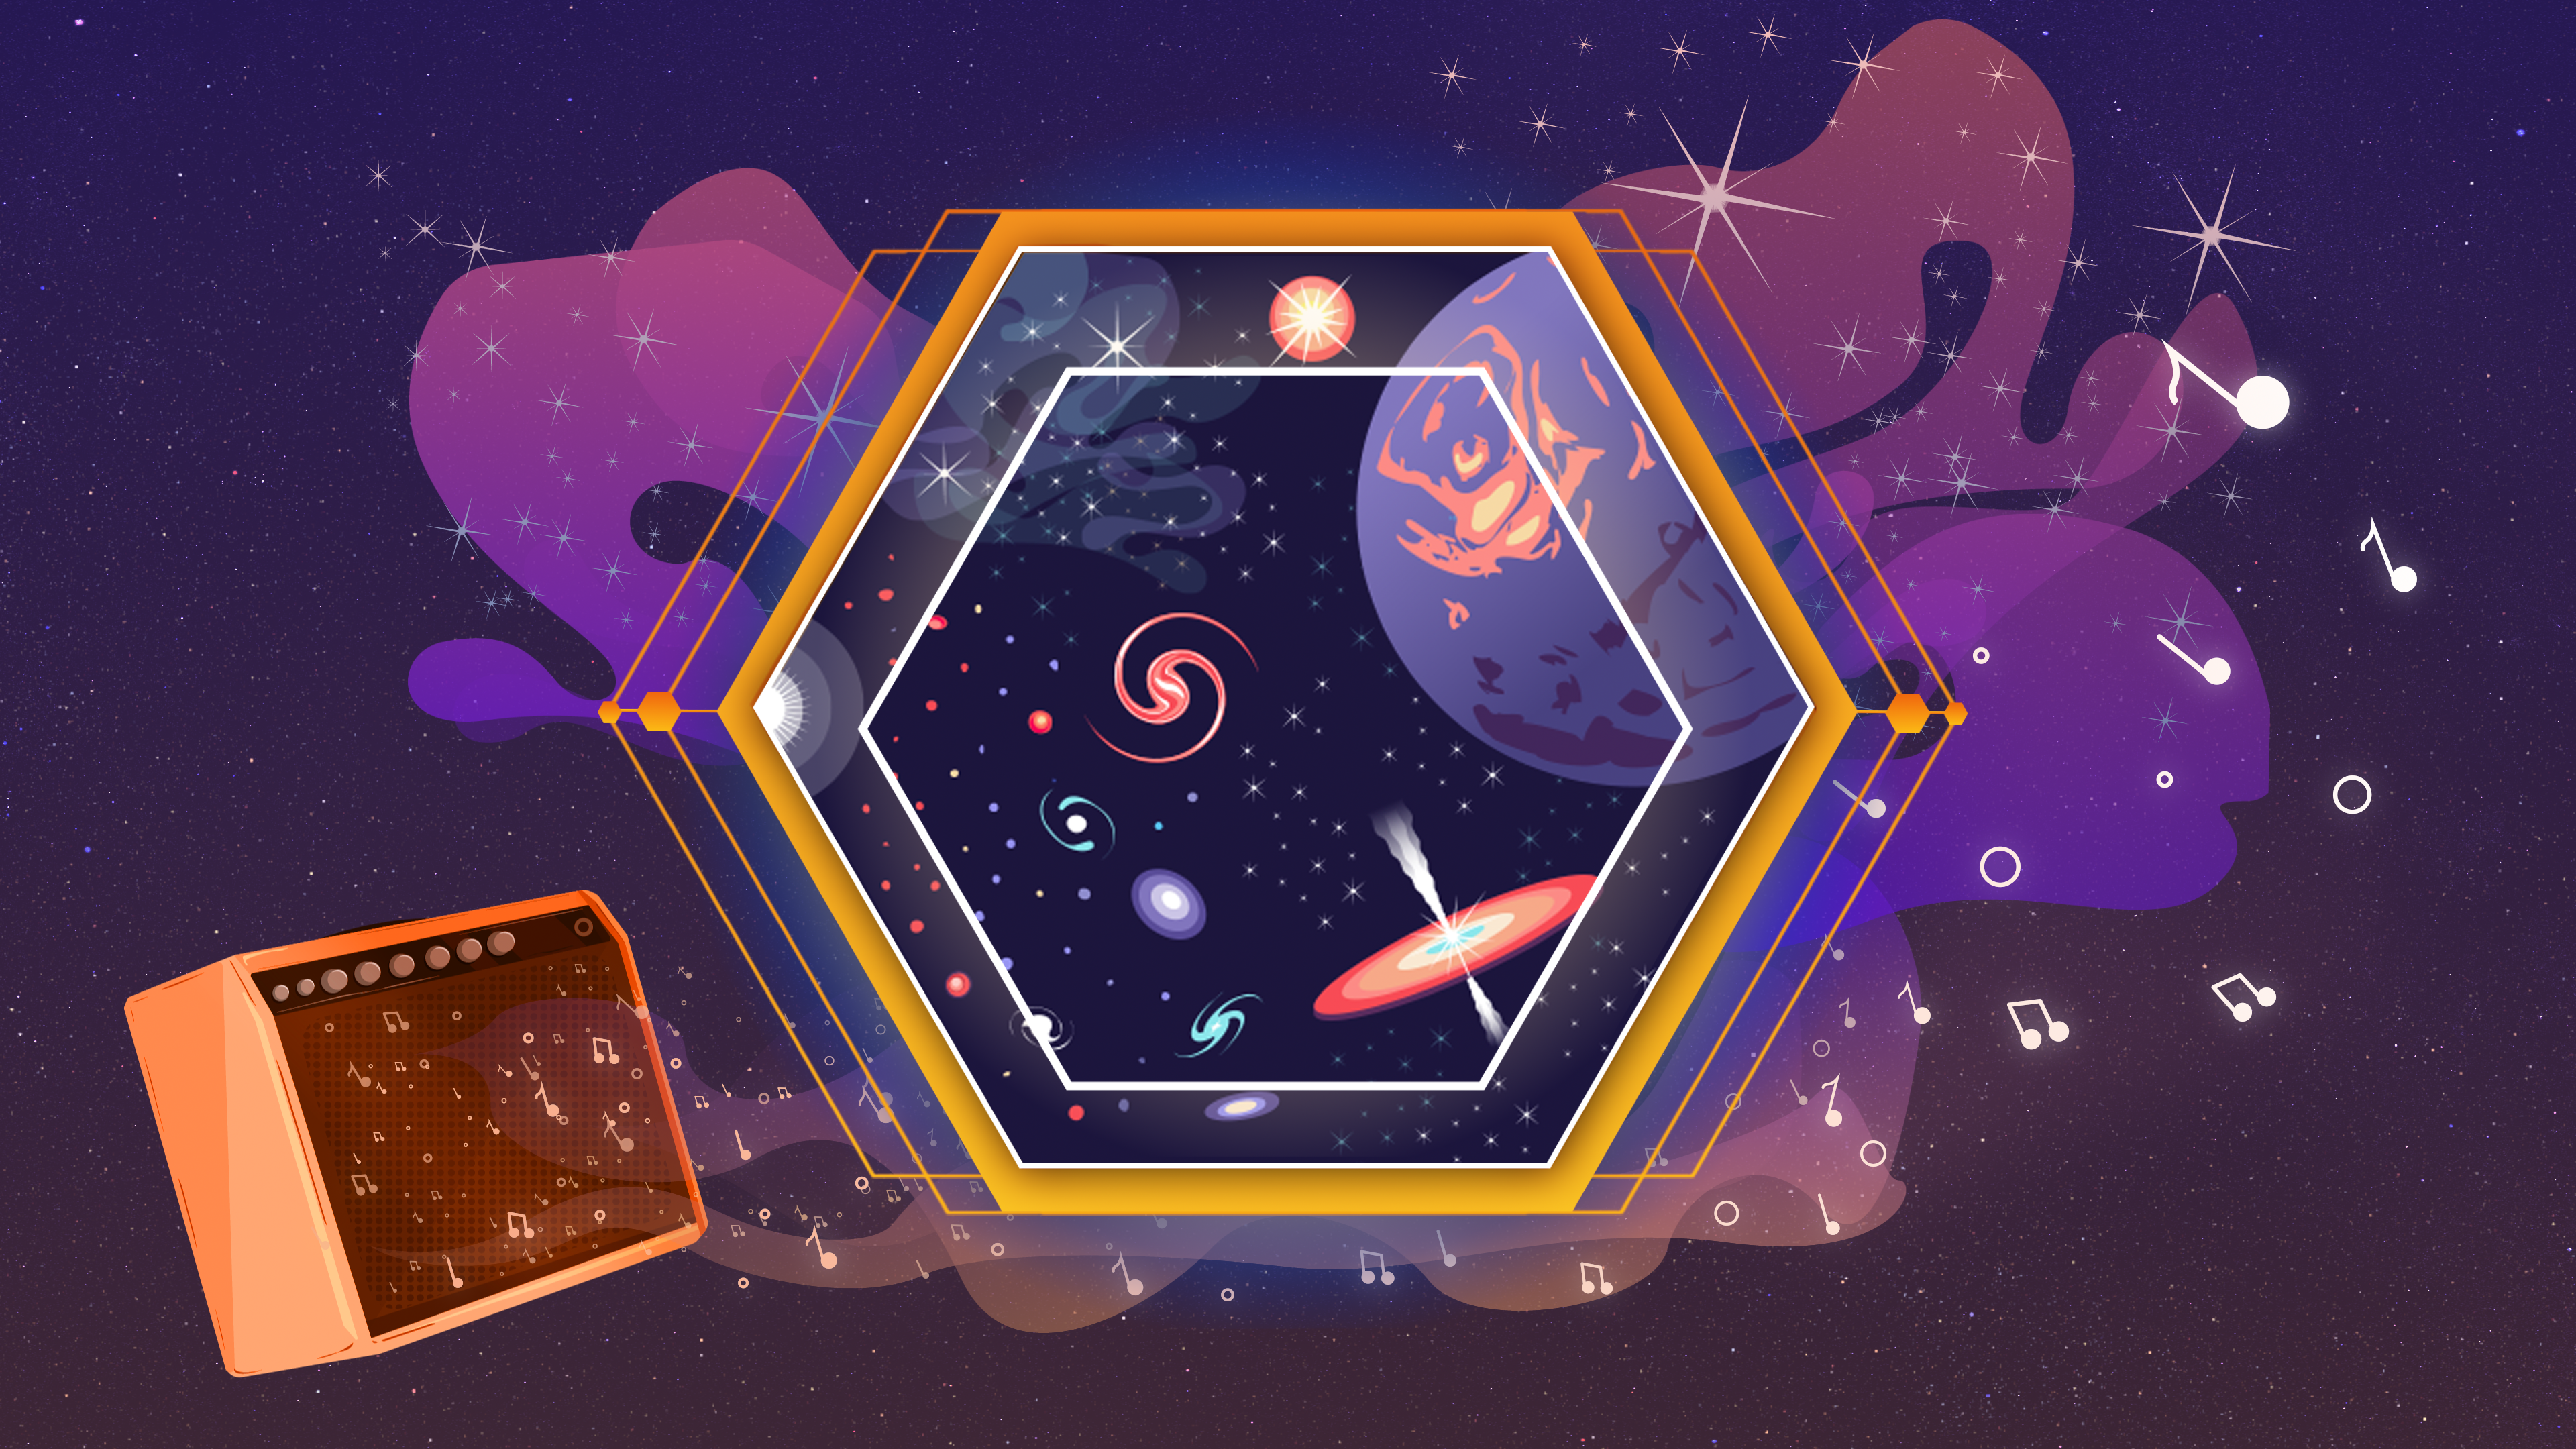

James Webb Space Telescope Sonifications

Explore some of the first full-colour infrared images and data from the NASA/ESA/CSA James Webb Space Telescope – by listening. Enter the complex soundscape of the Cosmic Cliffs in the Carina Nebula, explore the contrasting tones of two images that depict the Southern Ring Nebula, and identify the individual data points in a transmission spectrum of hot gas giant exoplanet WASP-96 b.

These audio tracks speceifically support blind and low-vision listeners, but are designed to be captivating to anyone who tunes in. These tracks are not actual sounds recorded in space. Instead, musicians mapped Webb’s data into sound, and the music has been carefully composed to accurately represent details the team would like listeners to focus on. In a way, these sonifications are like modern dance or abstract painting: they convert Webb’s images and data to a new medium to engage and inspire listeners.

Credit: NASA, ESA, CSA, Joseph Olmsted (STScI)